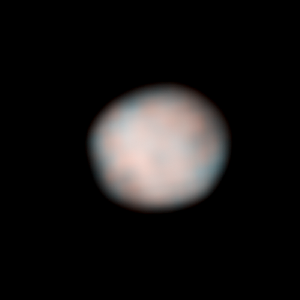

Vesta - HST - 194° longitude

Vesta - HST - 194° longitude

Credit: NASA, ESA, J.-Y. Li (University of Maryland, College Park), and L. McFadden (NASA/GSFC)